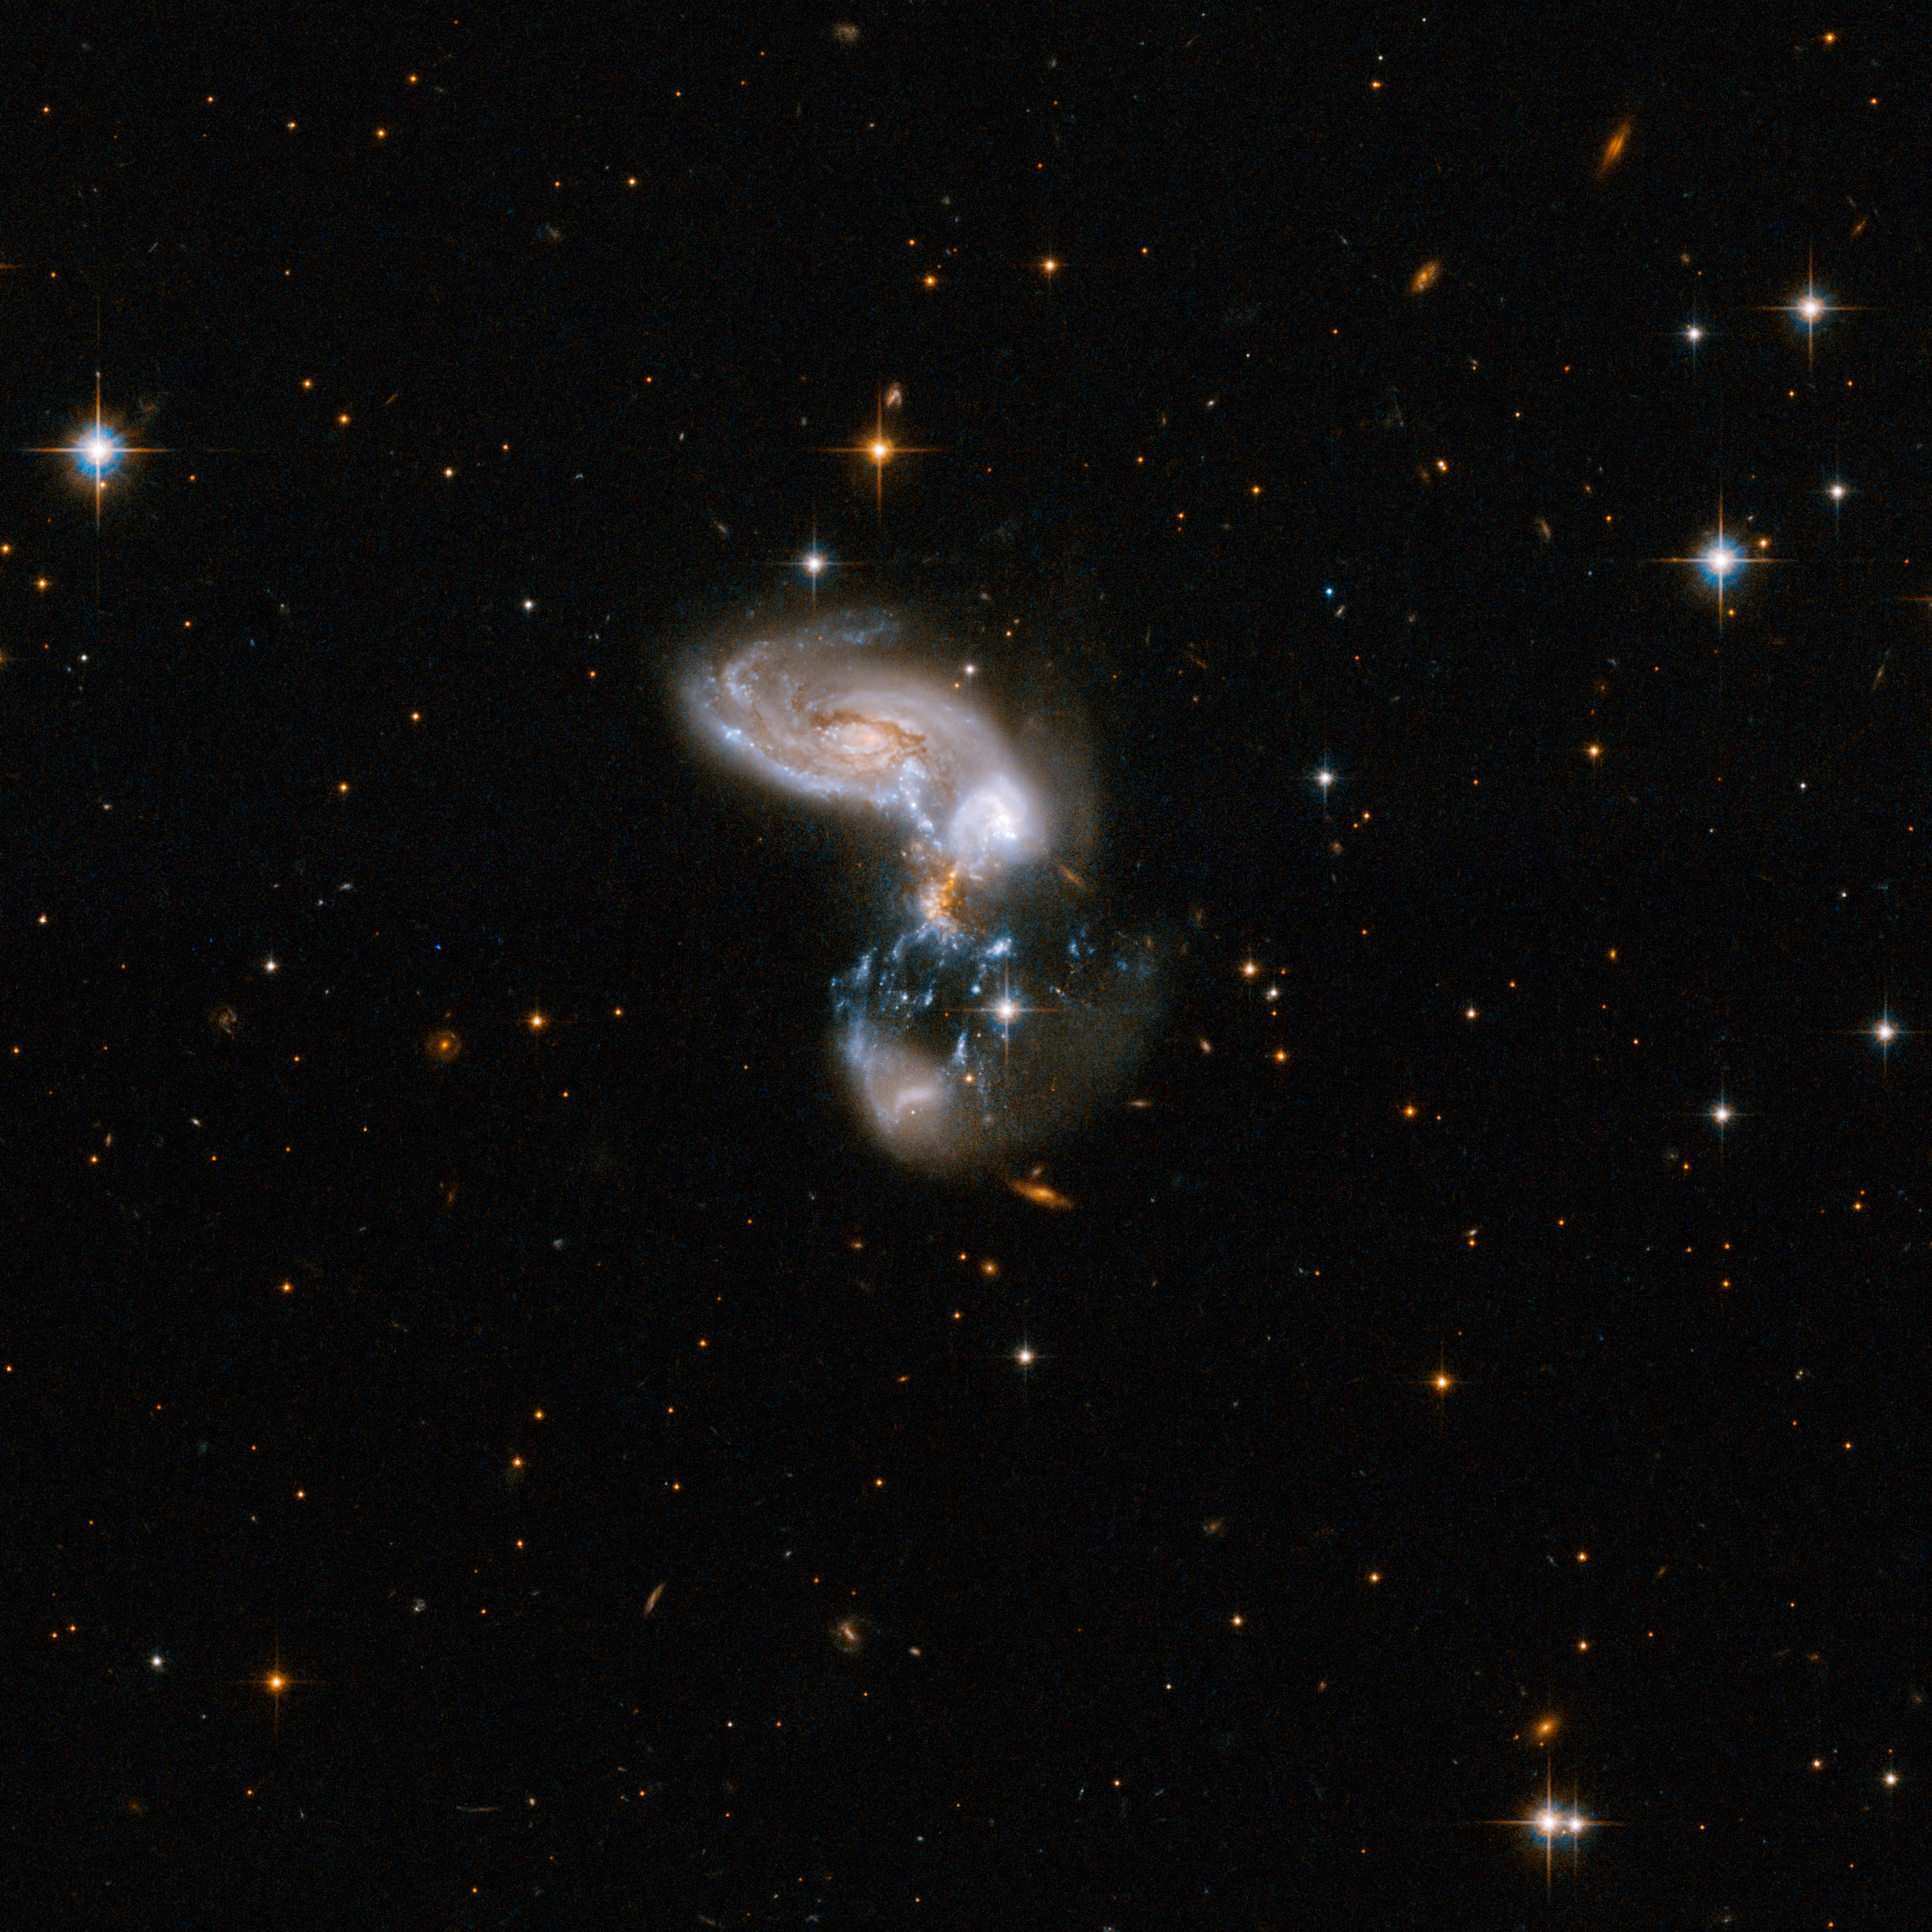

ZW II 96

This is a system of merging galaxies with a bizarre shape. Powerful young starburst regions hang as long threadlike structures between the main galaxy cores. The system almost qualifies as an ultraluminous system, but has not yet reached the late stage of coalescence that is the norm for most ultraluminous systems. Zw II 96 is located in the constellation of Delphinus, the Dolphin, about 500 million light-years away from Earth.

This image is part of a large collection of 59 images of merging galaxies taken by the Hubble Space Telescope and released on the occasion of its 18th anniversary on 24th April 2008.

Credit: NASA, ESA, the Hubble Heritage Team (STScI/AURA)-ESA/Hubble Collaboration and A. Evans (University of Virginia, Charlottesville/NRAO/Stony Brook University)